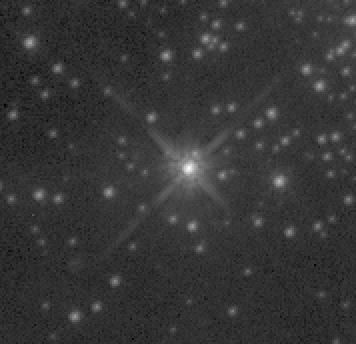

Melnick 34

An image of Melnick 34, made with the new Wide Field and Planetary Camera's (WFPC-2) improved optics. With an exposure equivalent to an WFPC-1 image, this WFPC-2 image collects all the light from the central star into sharp focus because the telescope's spherical aberration is corrected by the new camera's optics. The WFPC-2 instrument was installed during the 1993 servicing mission.

Credit: NASA, ESA and STScI